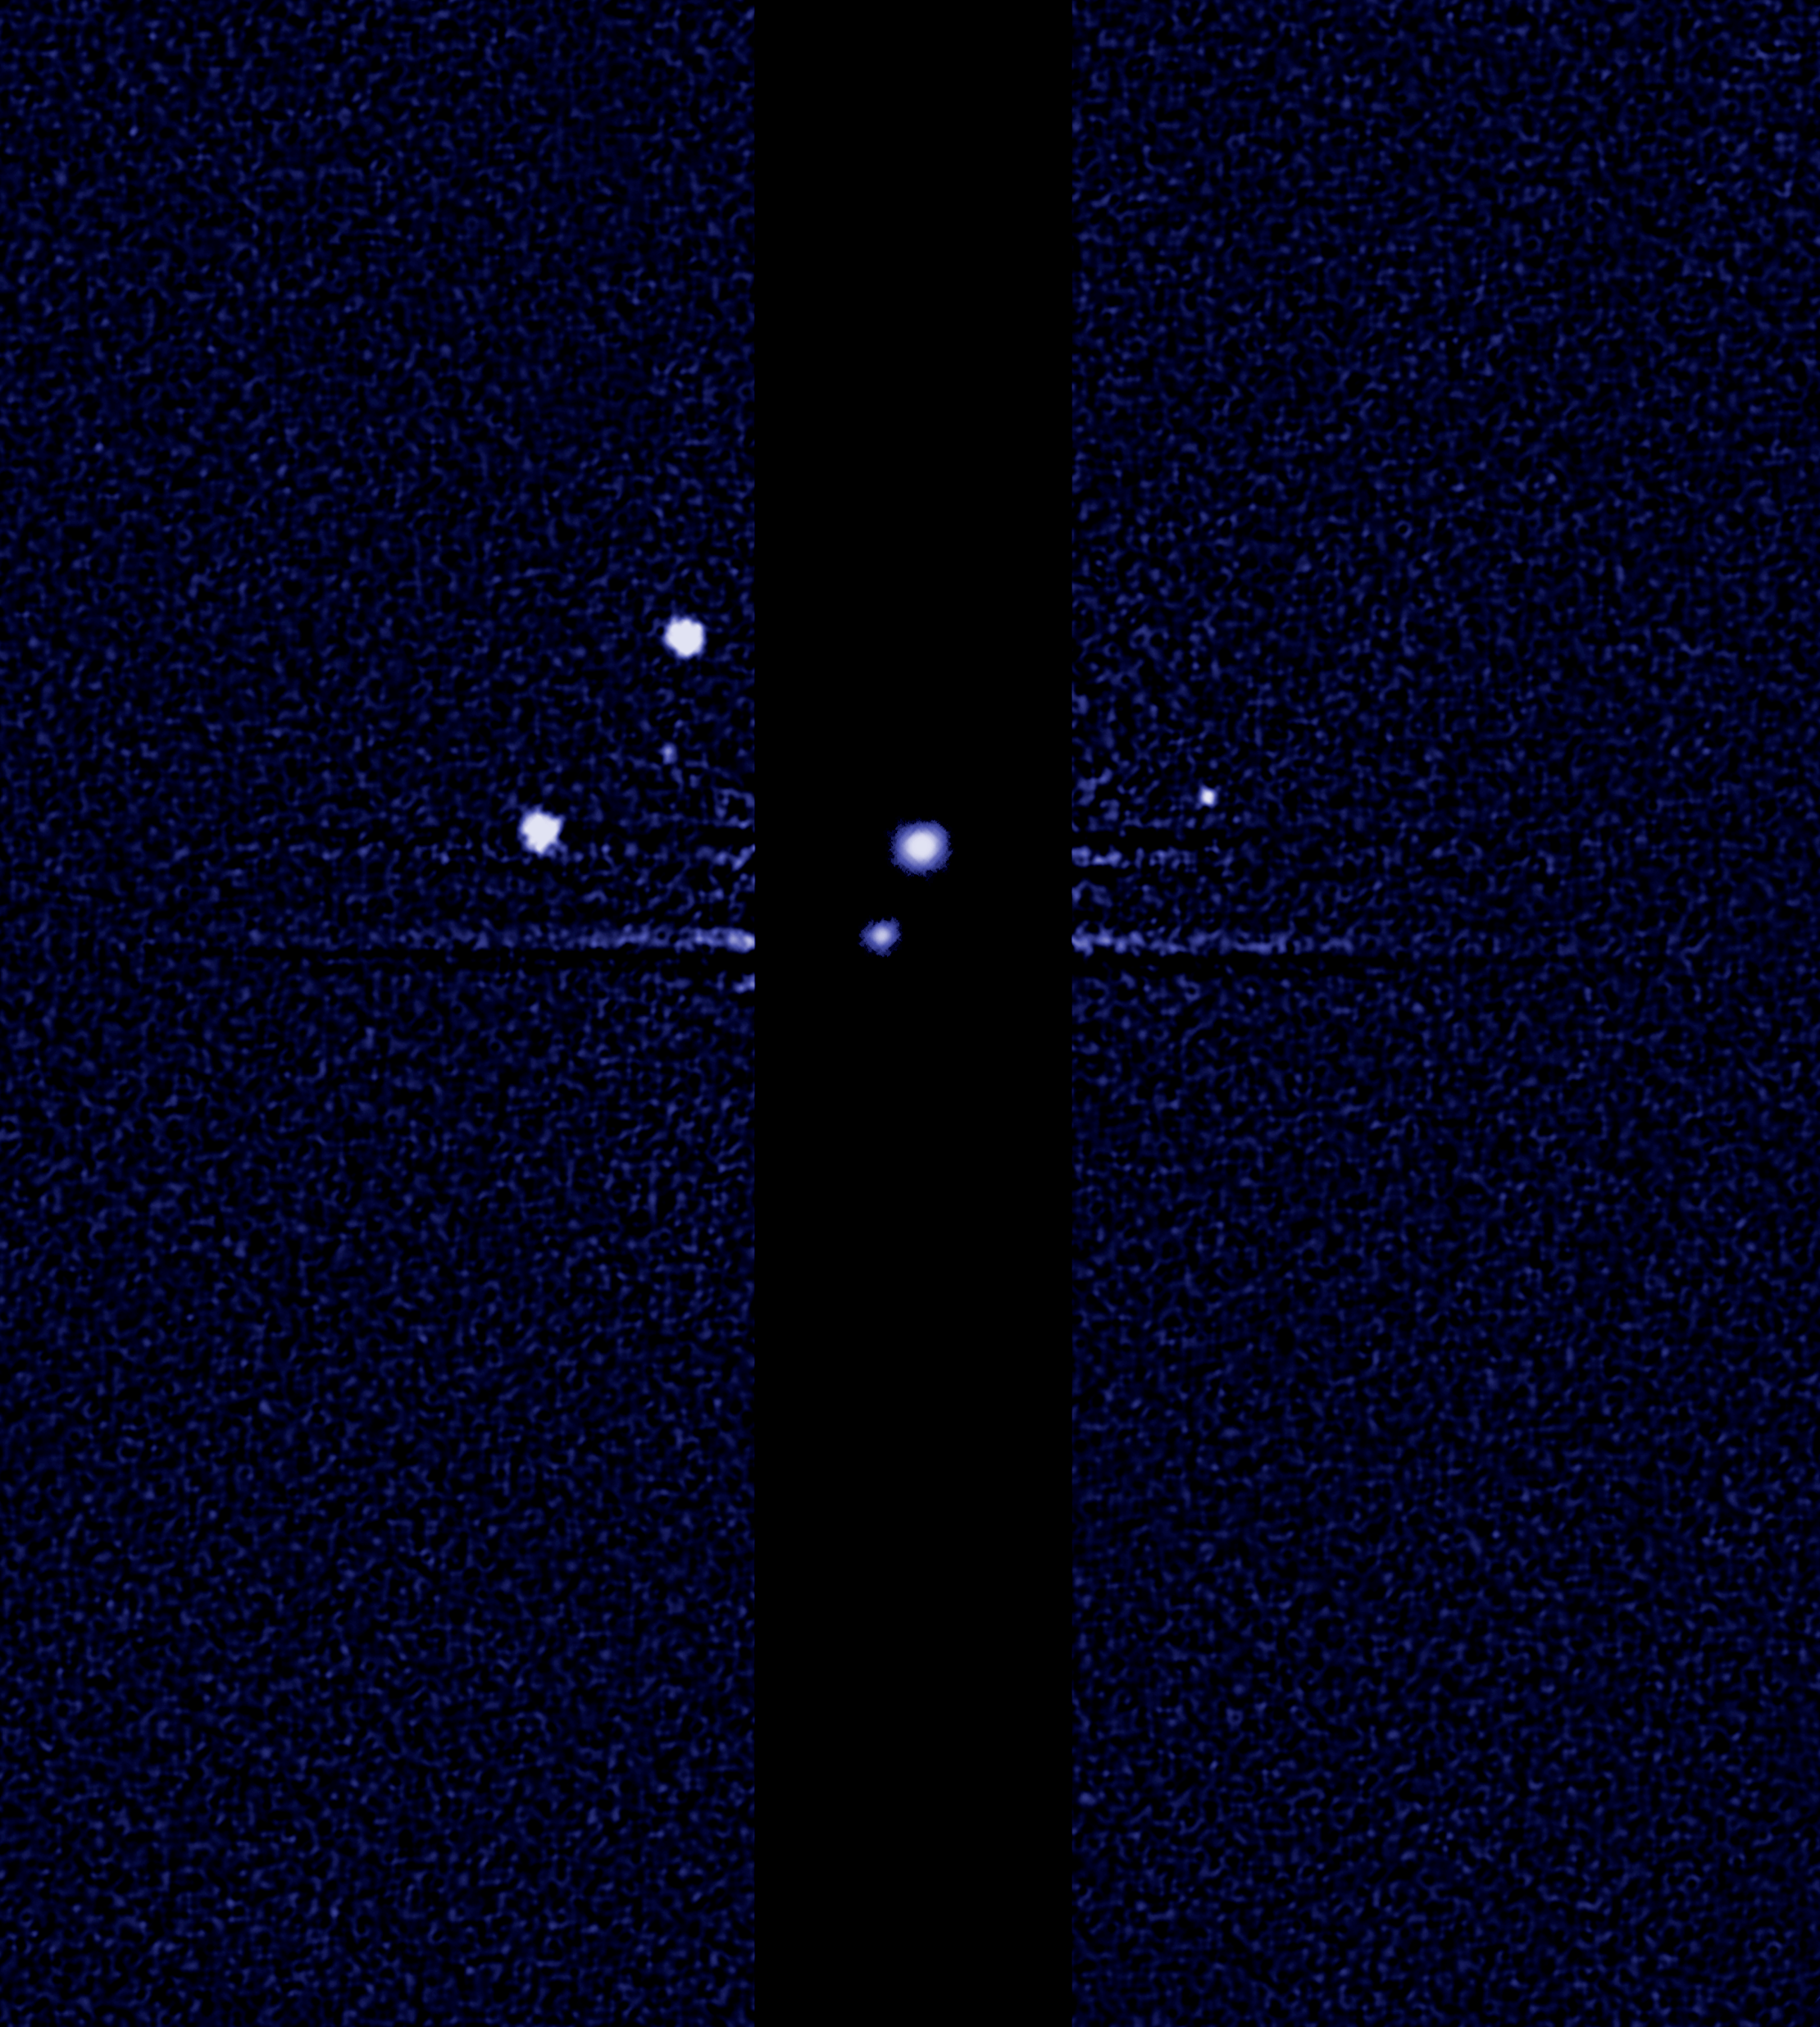

Hubble discovers a fifth moon orbiting Pluto (unannotated)

P5, S/2012 (134340) 1

Credit: NASA, ESA, and M. Showalter (SETI Institute)